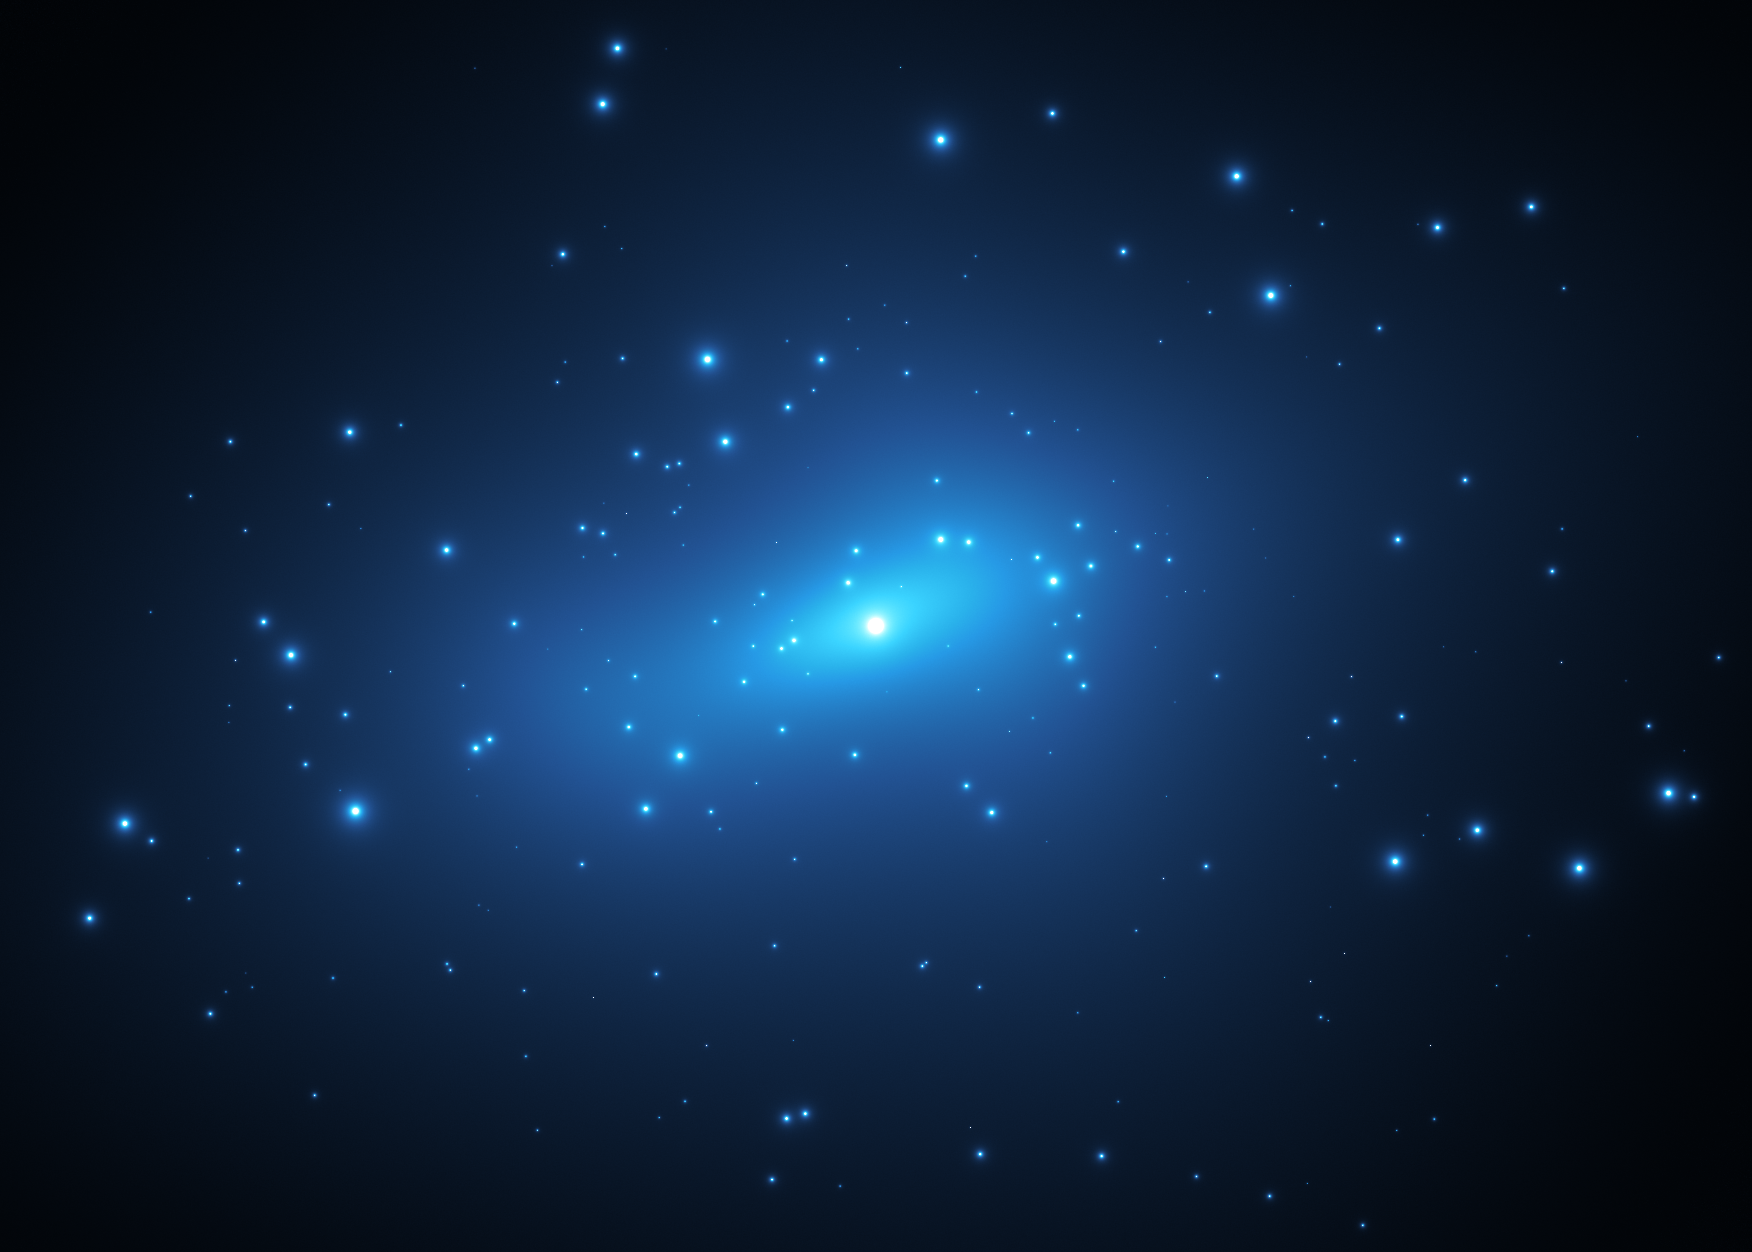

Small-Scale Concentrations of Dark Matter (Artist’s Impression)

This artist’s impression represents small-scale concentrations of dark matter in the galaxy cluster MACSJ 1206. Astronomers measured the amount of gravitational lensing caused by this cluster to produce a detailed map of the distribution of dark matter in it.

Dark matter is the invisible glue that keeps stars bound together inside a galaxy and makes up the bulk of the matter in the Universe.

Credit: ESA/Hubble, M. Kornmesser